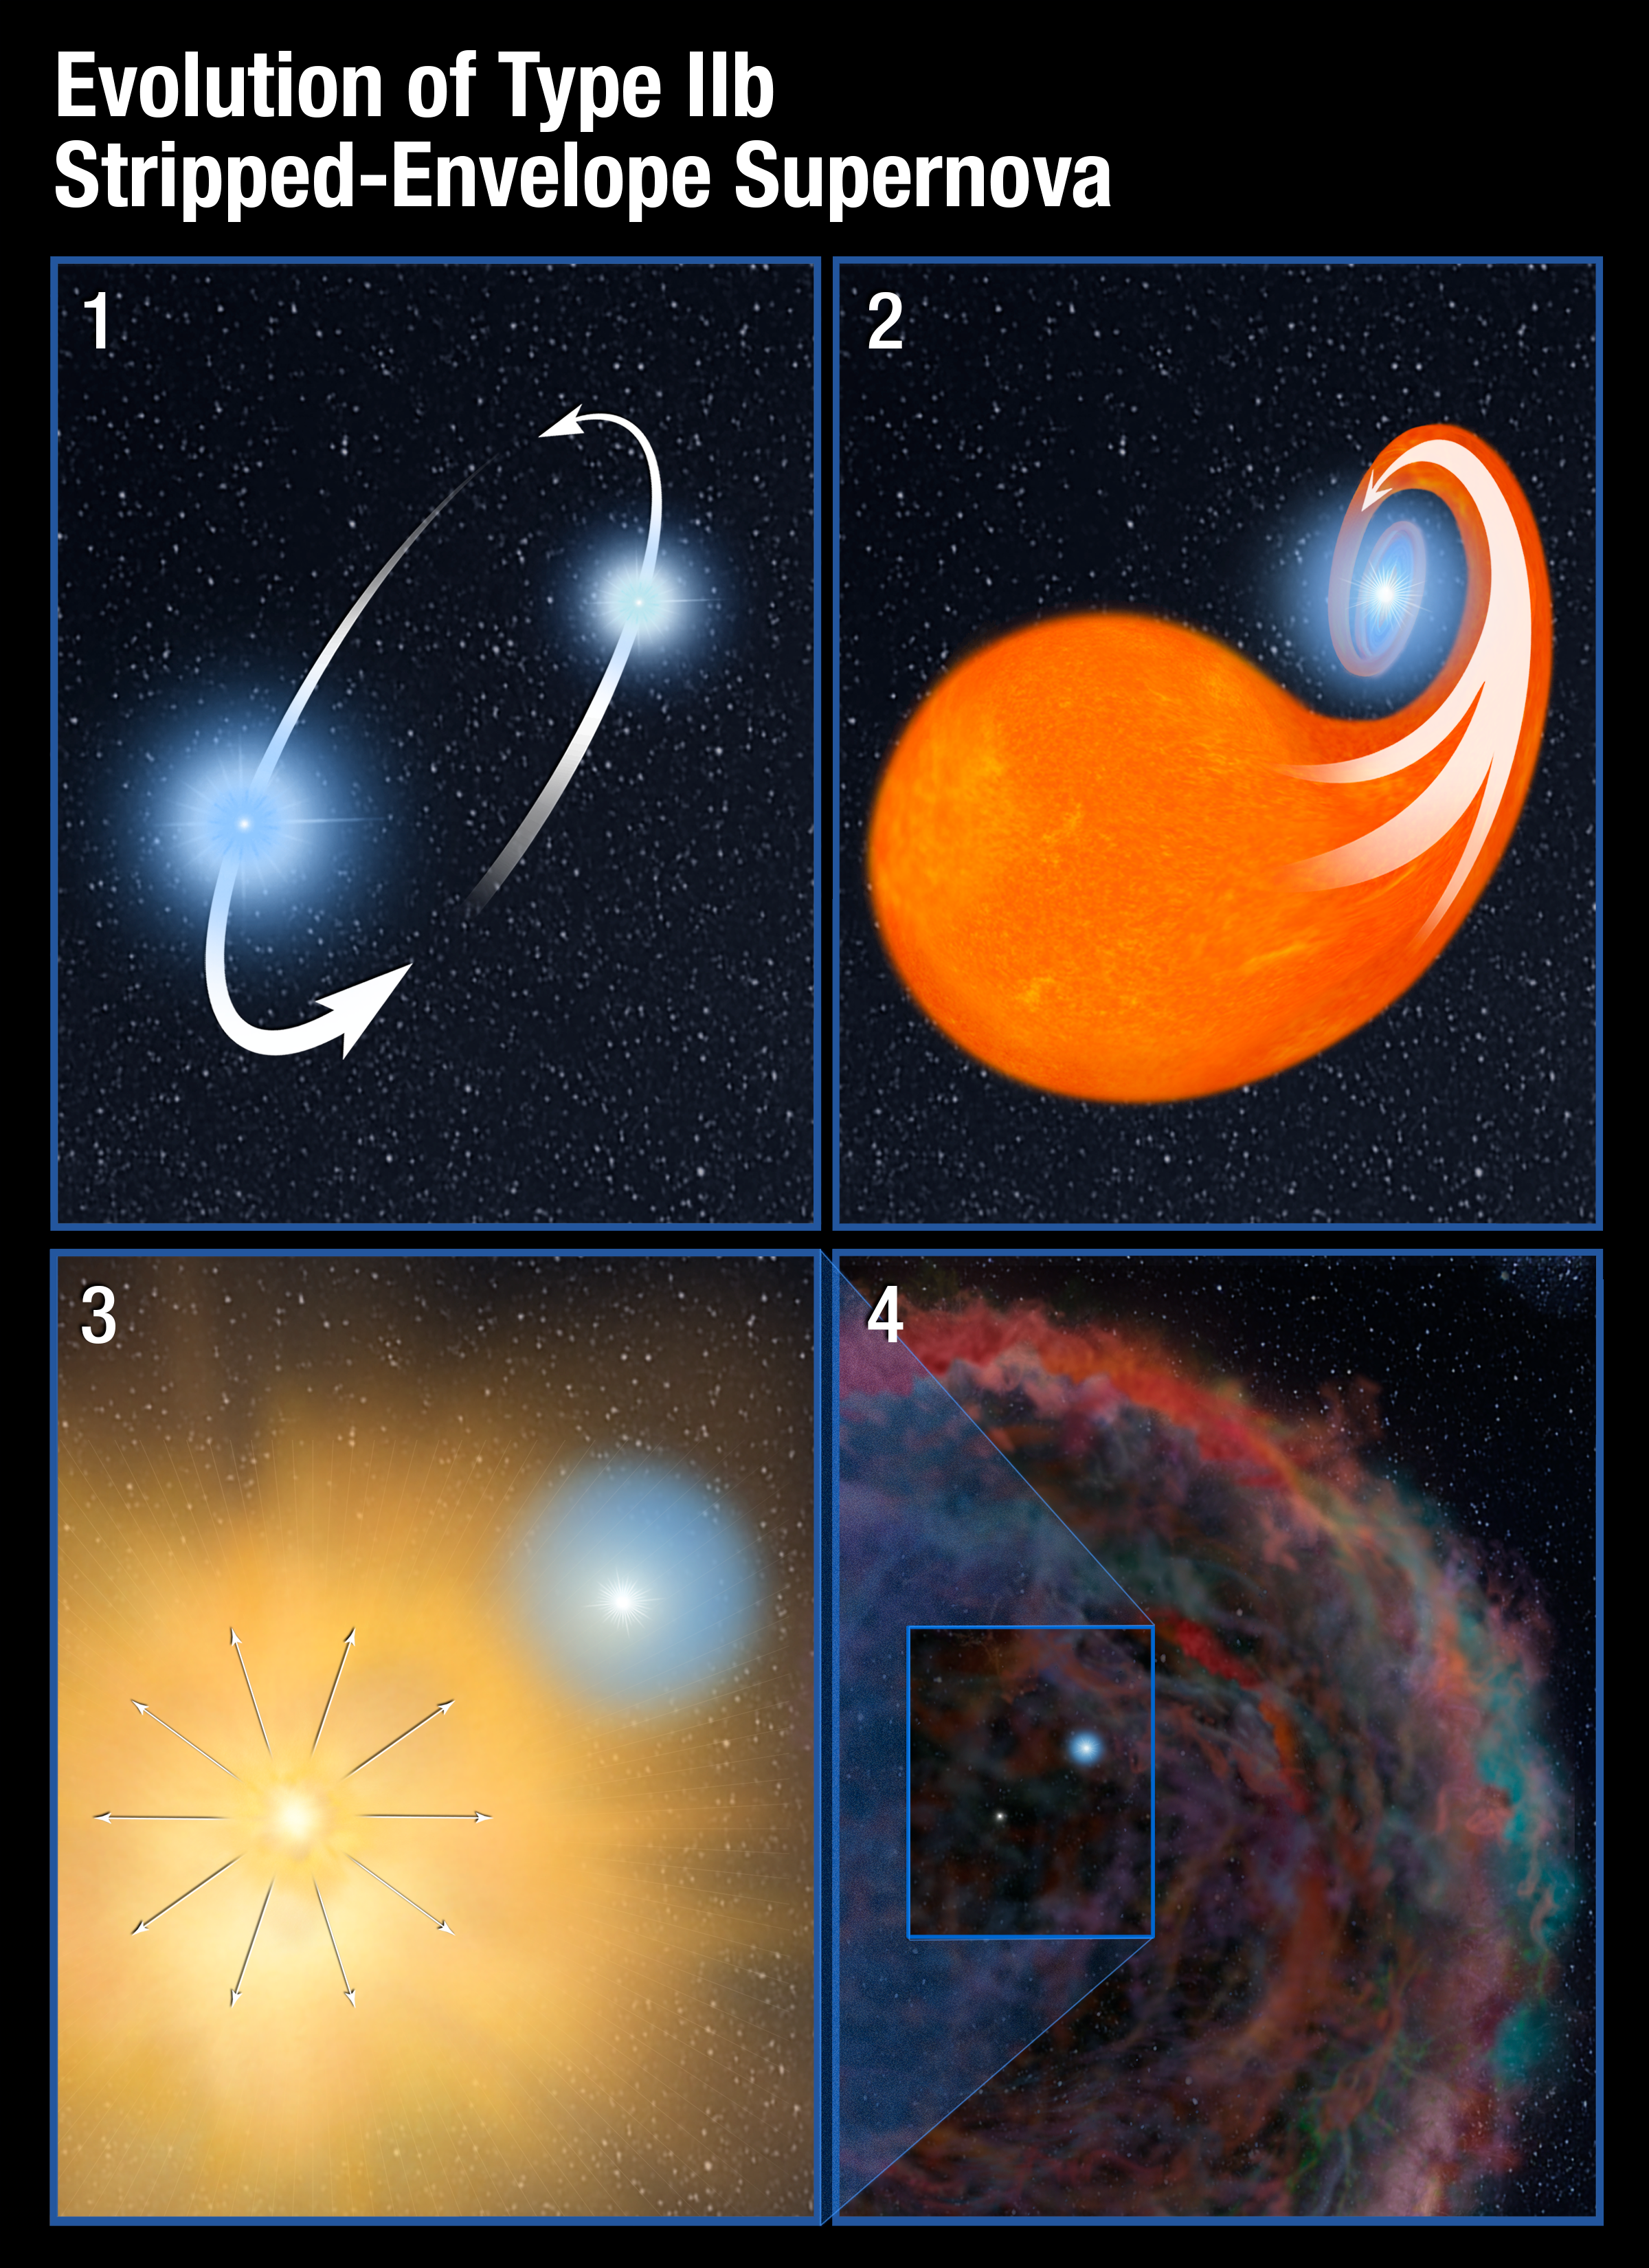

Evolution of Type IIb Stripped-Envelope Supernova

This graphic illustrates the scenario for the processes that create a Type IIb stripped-envelope supernova, in which most, but not all, of the hydrogen envelope is lost prior to the primary star’s explosion. The four panels show the interaction between the SN 2001ig progenitor star, which ultimately exploded, and its surviving companion. 1) Two stars orbit each other and draw closer and closer together. 2) The more massive star evolves faster, swelling up to become a red giant. In this late phase of life, it spills most of its hydrogen envelope into the gravitational field of its companion. As the companion siphons off almost all of the doomed star’s hydrogen, it creates an instability in the primary star. 3) The primary star explodes in a supernova. 4) As the supernova’s glow fades, the surviving companion becomes visible to the Hubble Space Telescope. The faint remnant of the supernova, at lower left, continues to evolve but in this case is too faint to be detected by Hubble.

Credit: NASA, ESA, and A. Feild (STScI)